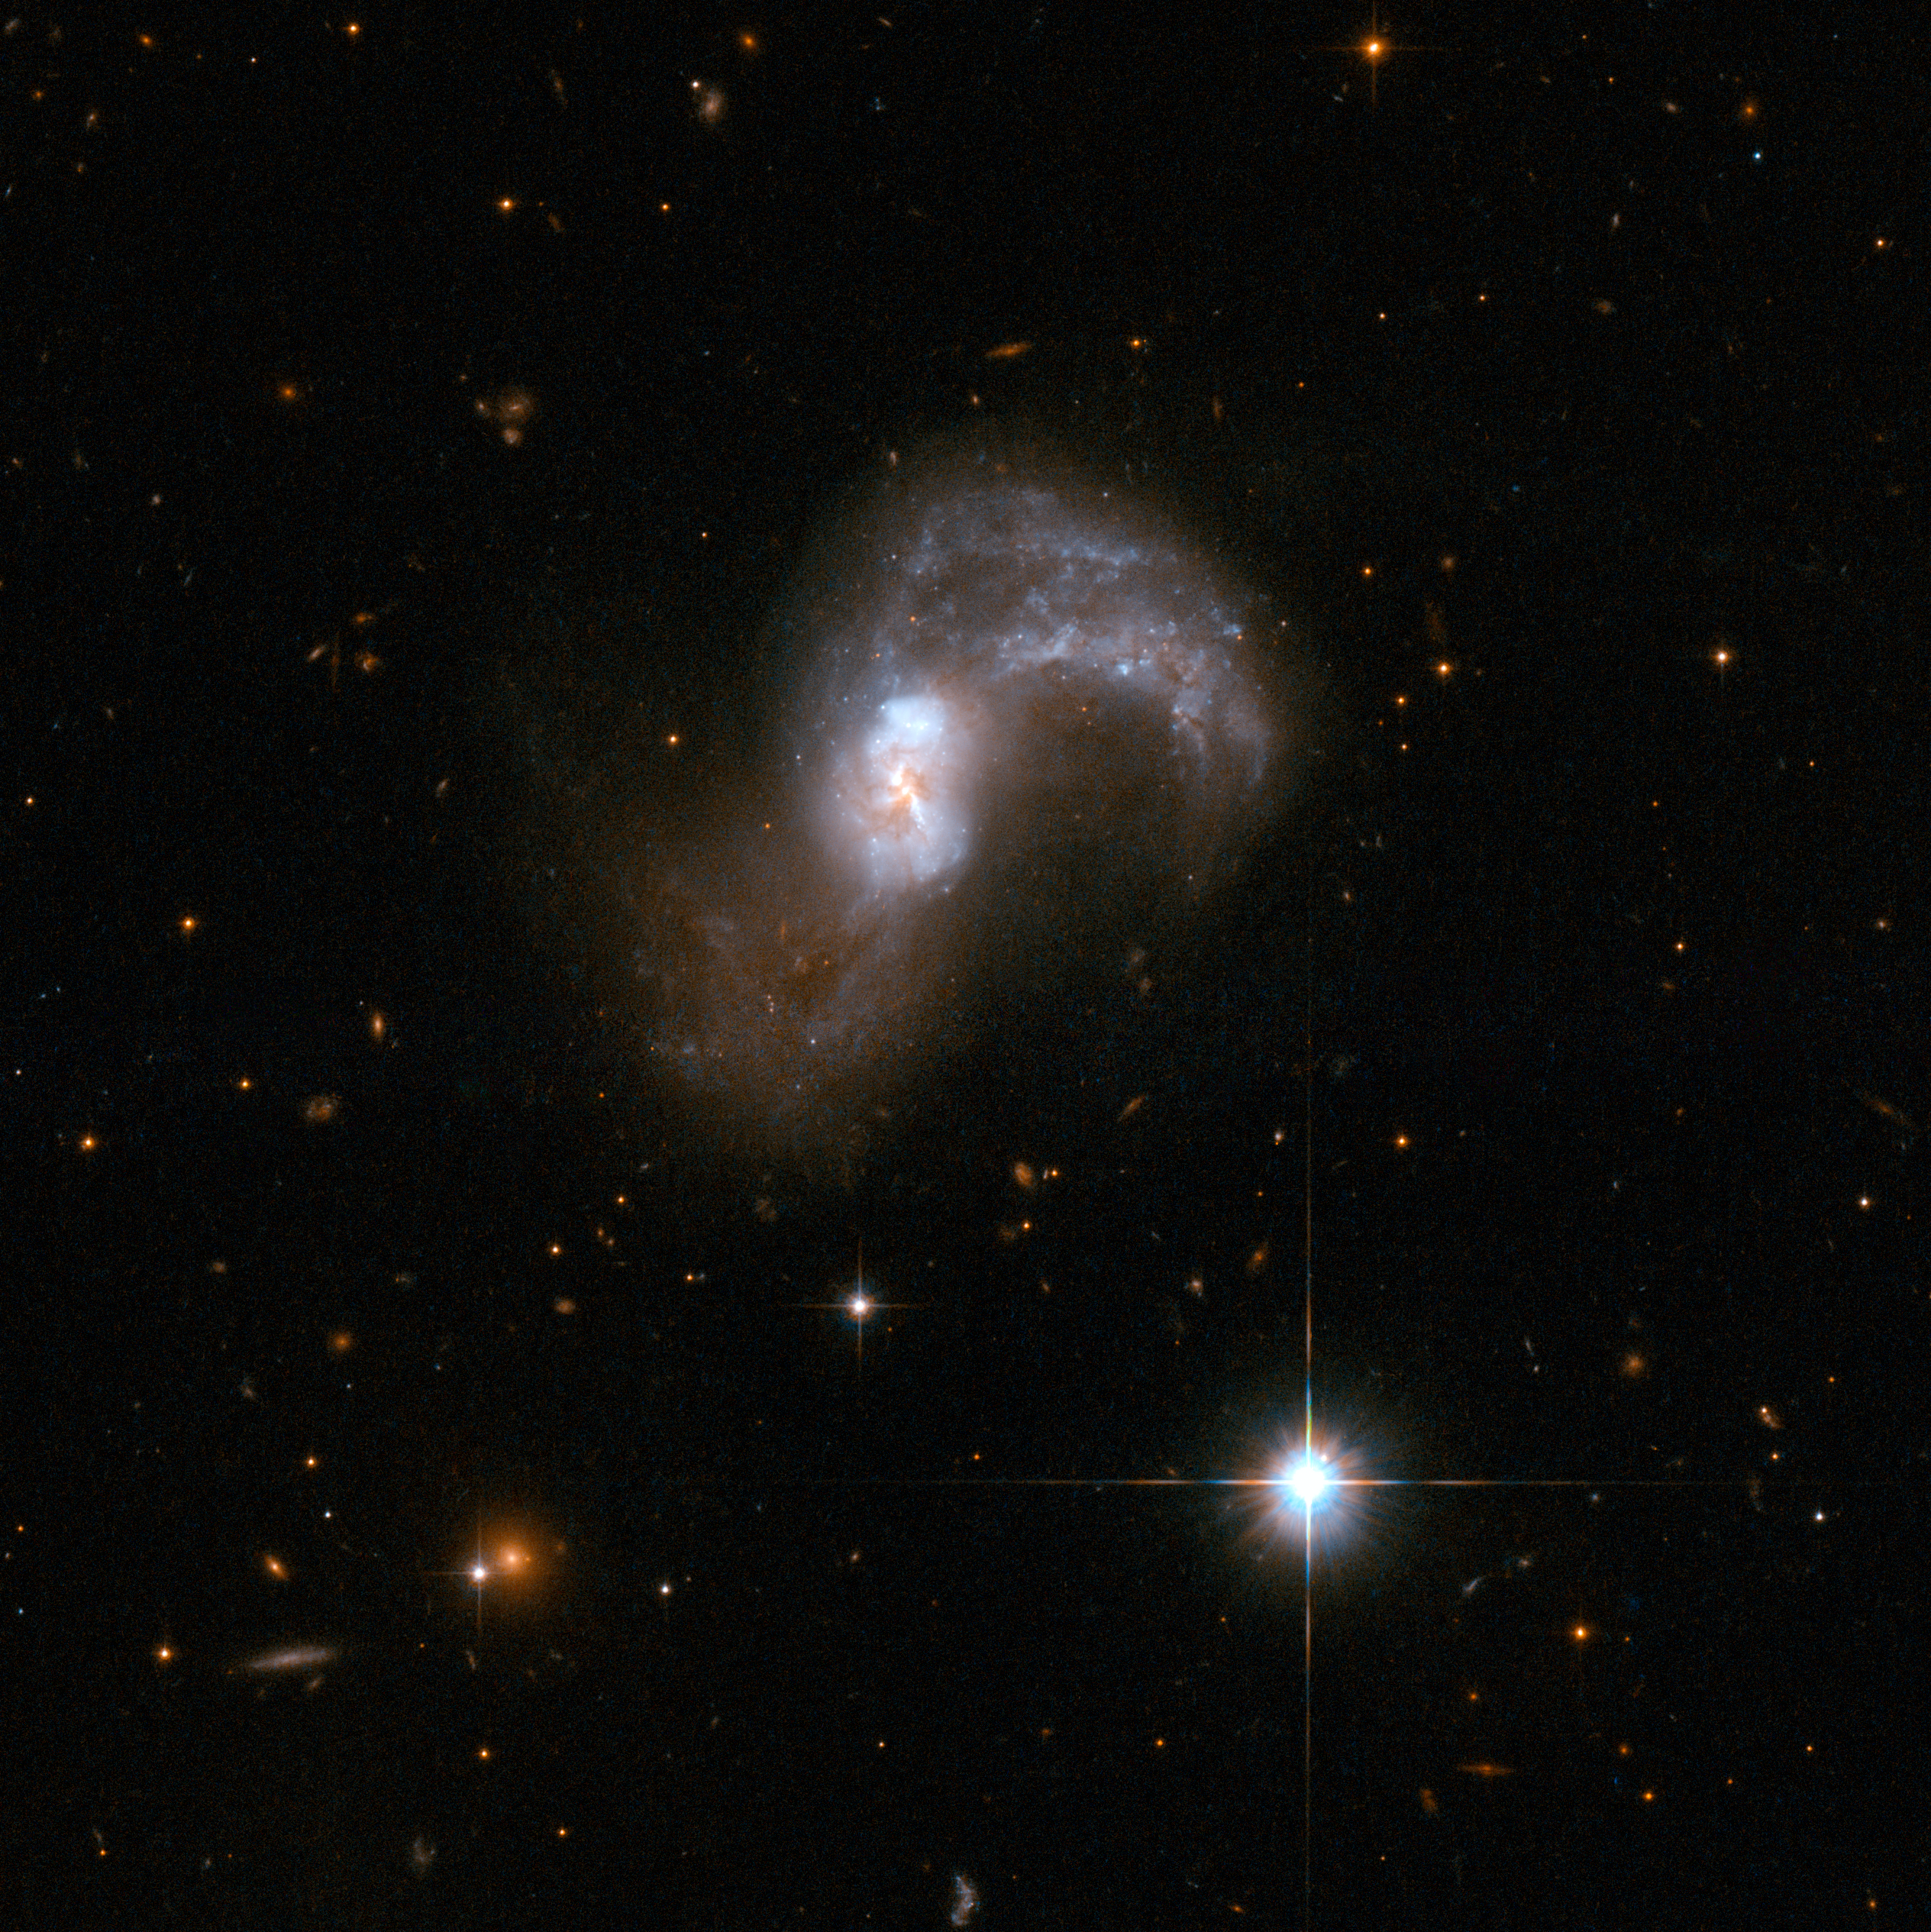

IC 2545

IC 2545 is a beautiful, but deceptive object that appears to be a single S-shaped galaxy, but is actually a pair of merging galaxies. The two cores of the parent galaxies are still visible in the central region. Other telltale markers for the collision include two pronounced tidal arms of gas and stars flung out from the central region. The tidal arm curving upwards and clockwise in the image contains a number of blue star clusters. IC 2545 glows strongly in the infrared part of the spectrum - another sign that it is a pair of merging galaxies. It lies in the constellation of Antlia, the Air Pump, some 450 million light-years away from Earth.

This image is part of a large collection of 59 images of merging galaxies taken by the Hubble Space Telescope and released on the occasion of its 18th anniversary on 24th April 2008.

Credit: NASA, ESA, the Hubble Heritage Team (STScI/AURA)-ESA/Hubble Collaboration and A. Evans (University of Virginia, Charlottesville/NRAO/Stony Brook University)